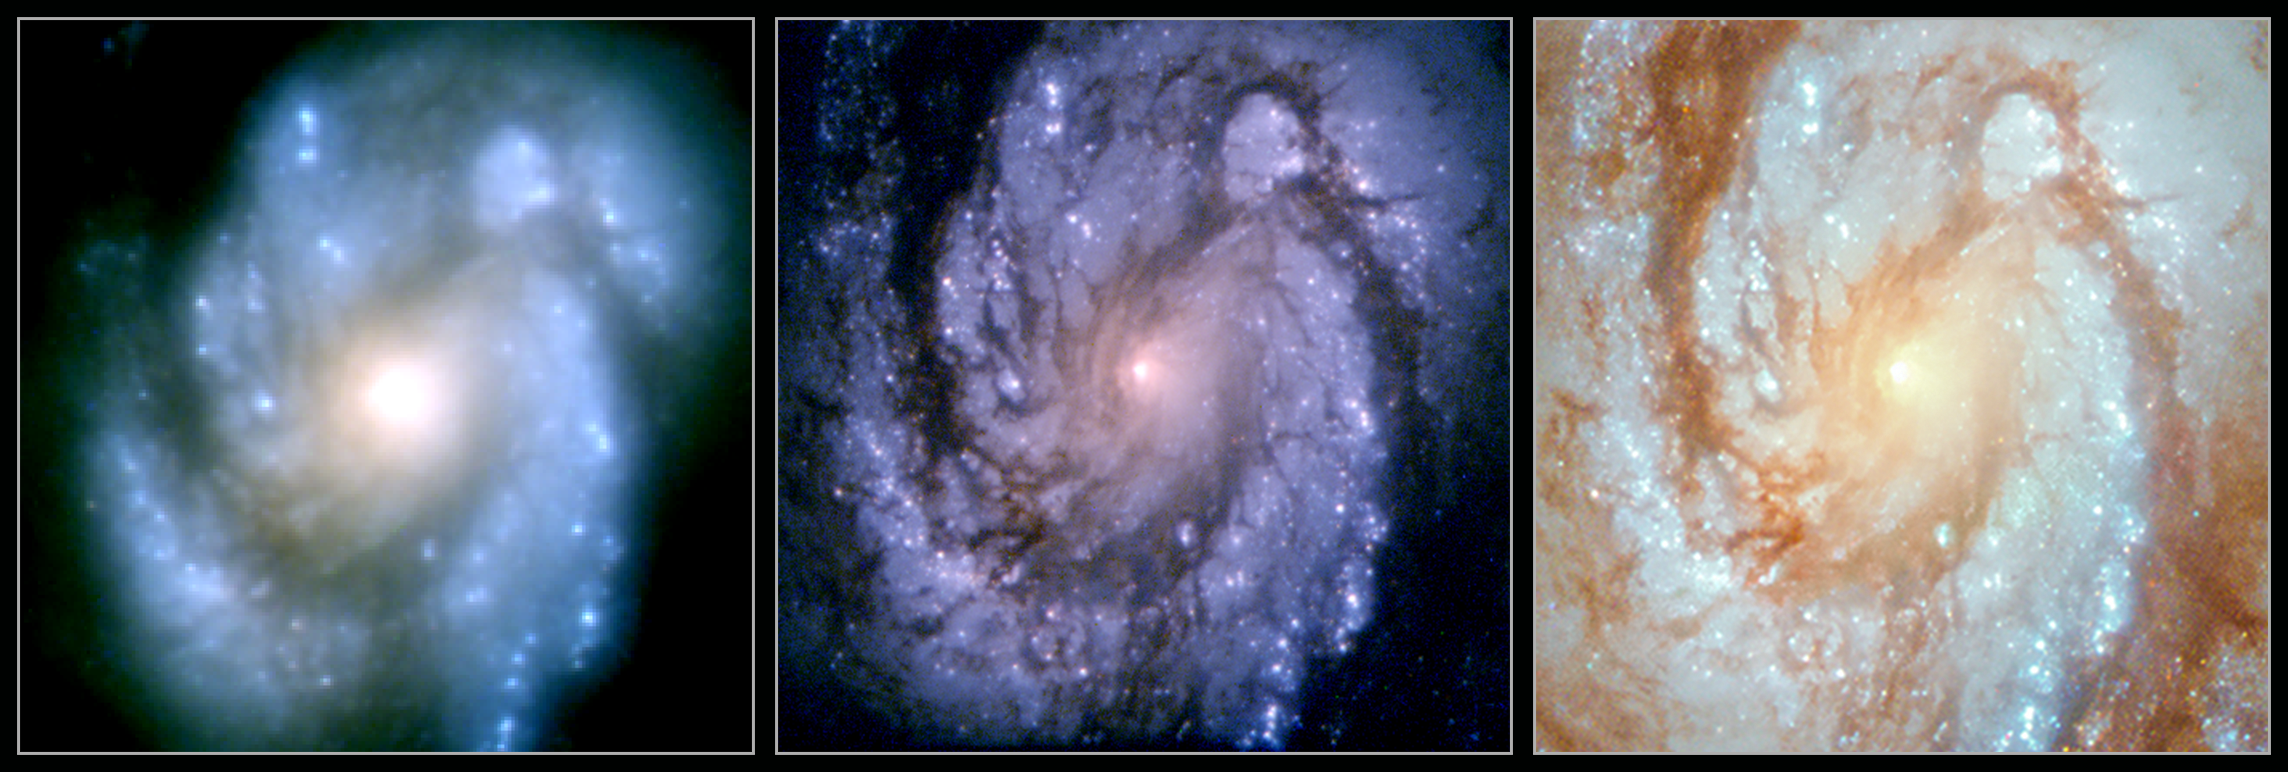

Messier 100 shows improvements of Hubble

This collage shows the spiral galaxy Messier 100 as it was observed with the NASA/ESA Hubble Space Telescope over the last 25 years. The three images of this stunning galaxy clearly show how the different servicing missions performed on Hubble improved the capabilities of the telescope.

The leftmost image was taken in 1993 with the Wide Field and Planetary Camera 1 (WFPC1) — Hubble’s first camera. The image is blurry, caused by the uncorrected spherical aberration of Hubble’s main mirror. The light striking the edges of the mirror was not travelling to the same focal point as the light from the centre.

The second, middle, image was taken in early 1994. with the newer Wide Field Planetary Camera 2 (WFPC2), which was installed during Servicing Mission 1, which took place in December 1993. The very same mission also installed a device named COSTAR (Corrective Optics Space Telescope Axial Replacement) on Hubble, which took account of this flaw of the mirror and allowed the scientific instruments to correct the images they received. WFPC2 was Hubble’s workhorse camera for many years and was only replaced in Servicing Mission 4, the fifth and final servicing mission.

The newest image — visible to the right — was taken with the Wide Field Camera 3 (WFC3) which was installed in 2009 during Servicing Mission 4. The image was taken in 2018 to celebrate the 25th anniversary of Servicing Mission 1.

Credit: NASA, ESA